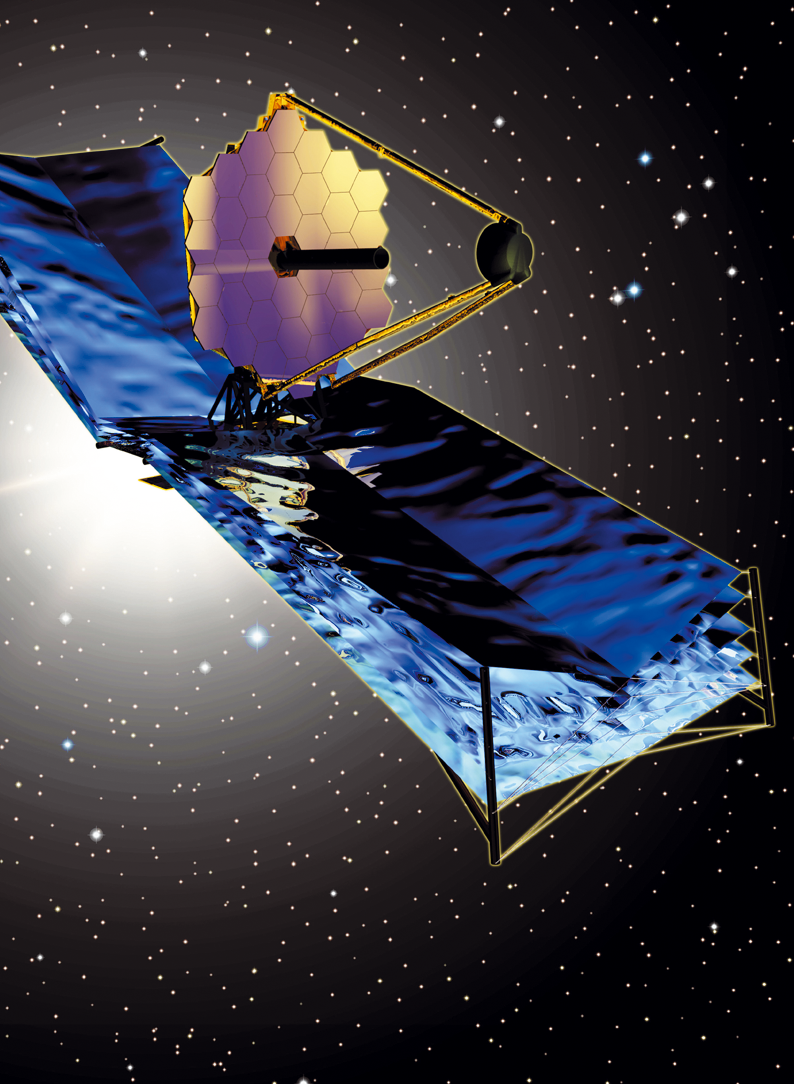

The James Webb Space Telescope (artist's impression)

Artist's impression of the James Webb Space Telescope showing its primary mirror pointing into the cosmos.

Credit: TRW-Ball